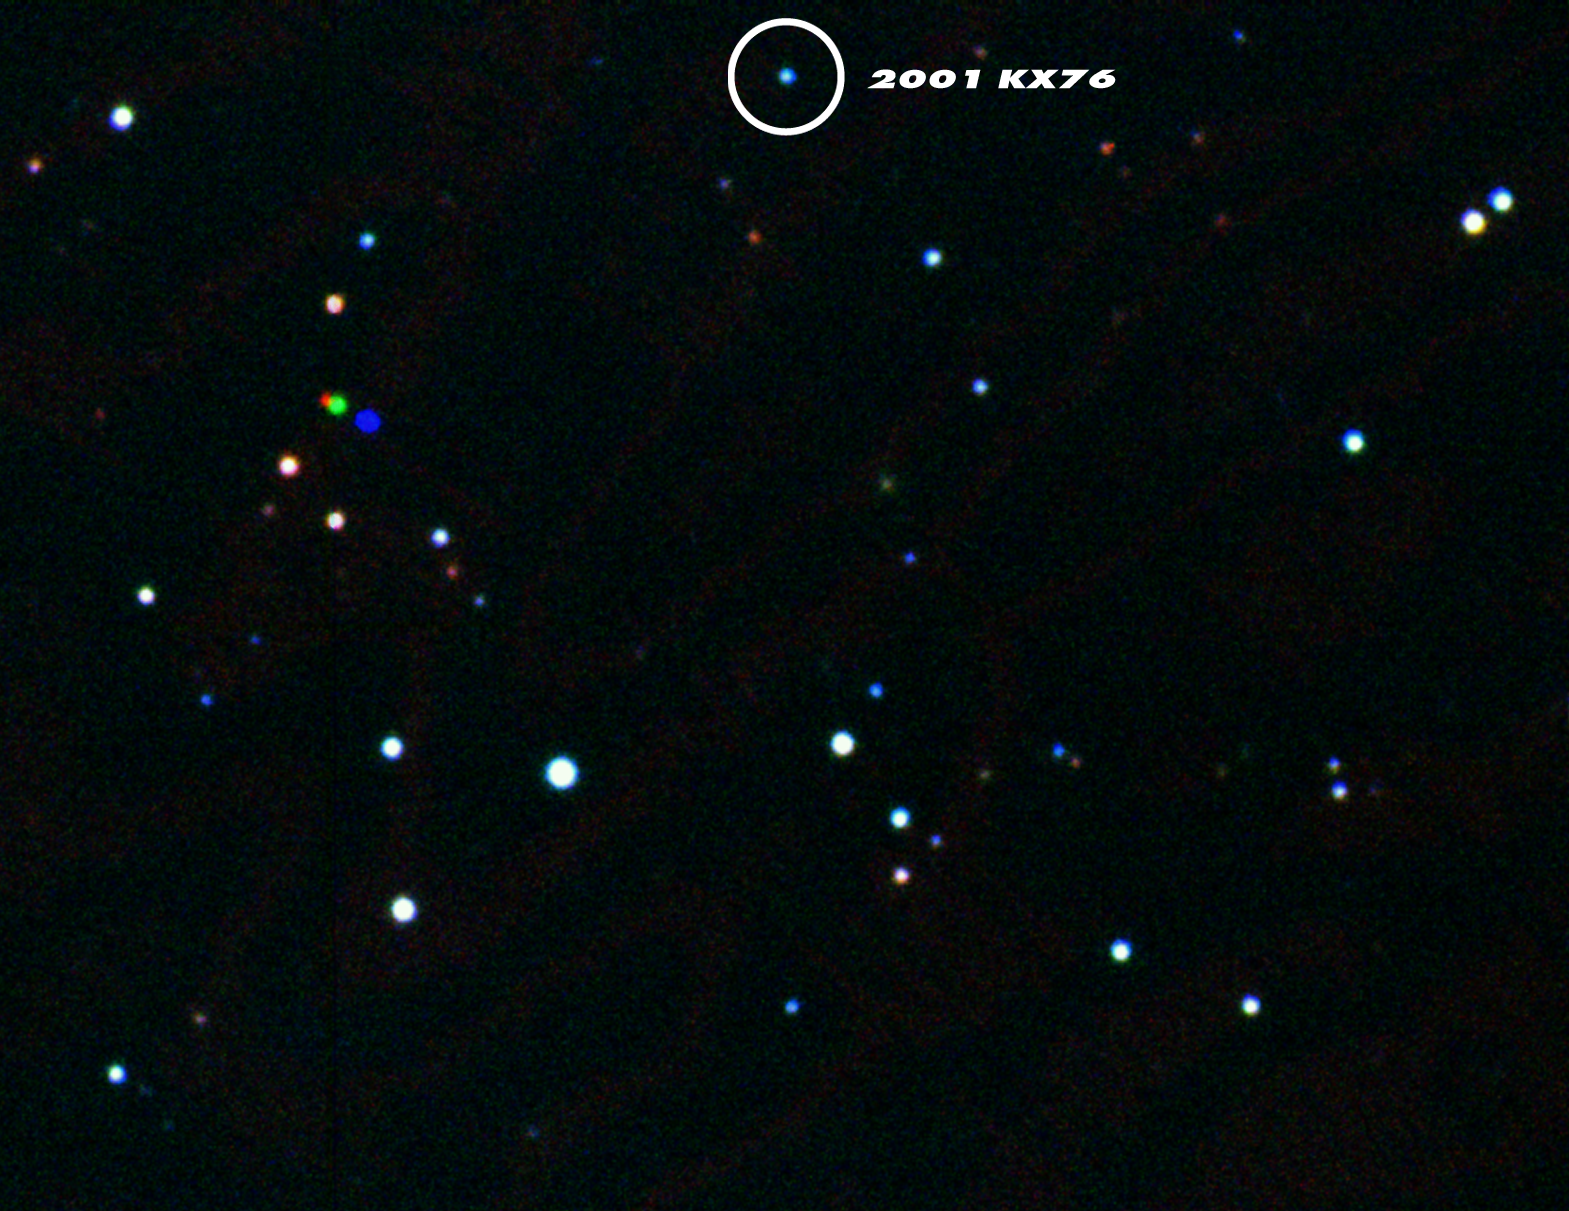

2001 KX76 - the record-breaking asteroid observed with Astrovirtel

This image is a colour composite image, based on three exposures with the Wide Field Imager (WFI) at the MPG/ESO 2.2-m telescope at the La Silla Observatory. The exposures were made through V, R and I-band filters. On the image another (closer) asteroid reveals itself - the coloured dots to the left reveal that this object moved between the three exposures.

Credit: ESA, ESO, Astrovirtel & Gerhard Hahn (German Aerospace Center, DLR)